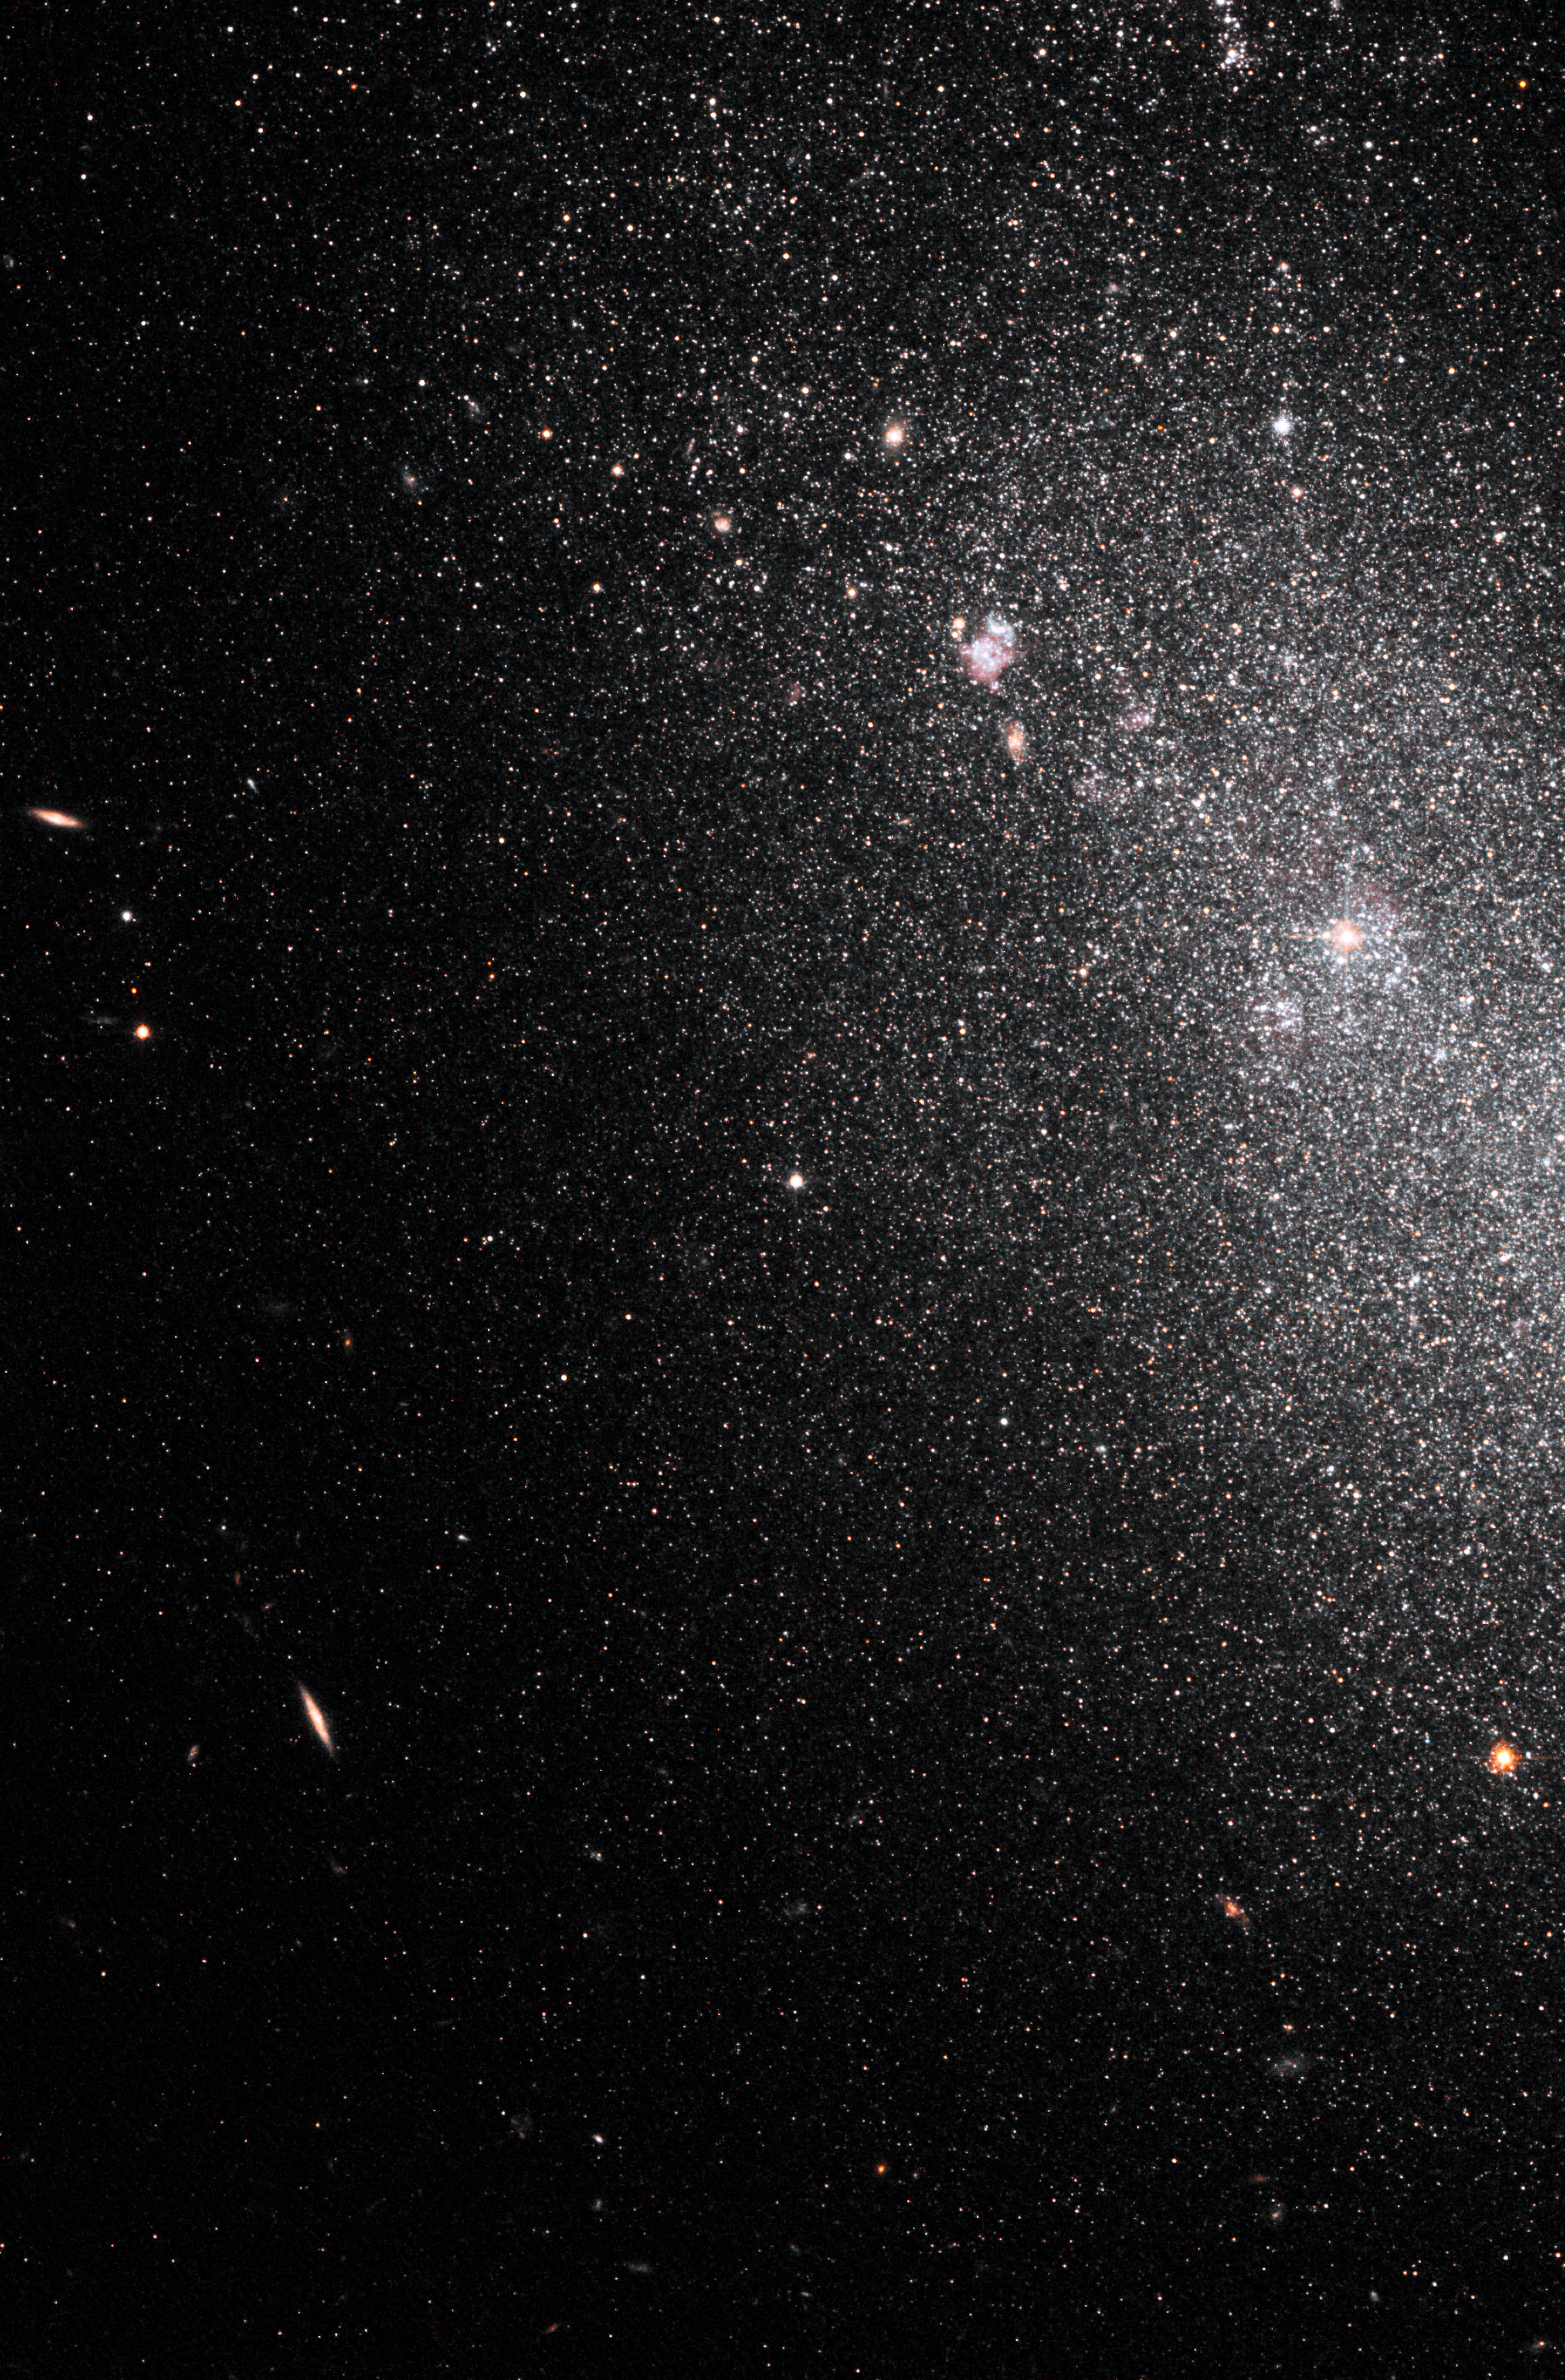

Hubble ACS image of NGC 4068

This image, taken by the NASA/ESA Hubble Space Telescope, shows myriad stars residing in the central regions of the dwarf galaxy NGC 4068. The bluish dots are younger stars; the reddish dots, older stars.

NGC 4068, located 14 million light-years away in the Ursa Major constellation, is part of a Hubble study of starbursts in nearby, small, or dwarf, galaxies. Based on this study, astronomers have found that starbursts continue 100 times longer than first thought, lasting 200 million to 400 million years. These galaxies show that starbursts are not isolated events, but sweep across a galaxy.

Credit: NASA, ESA and K. McQuinn (University of Minnesota, Minneapolis)